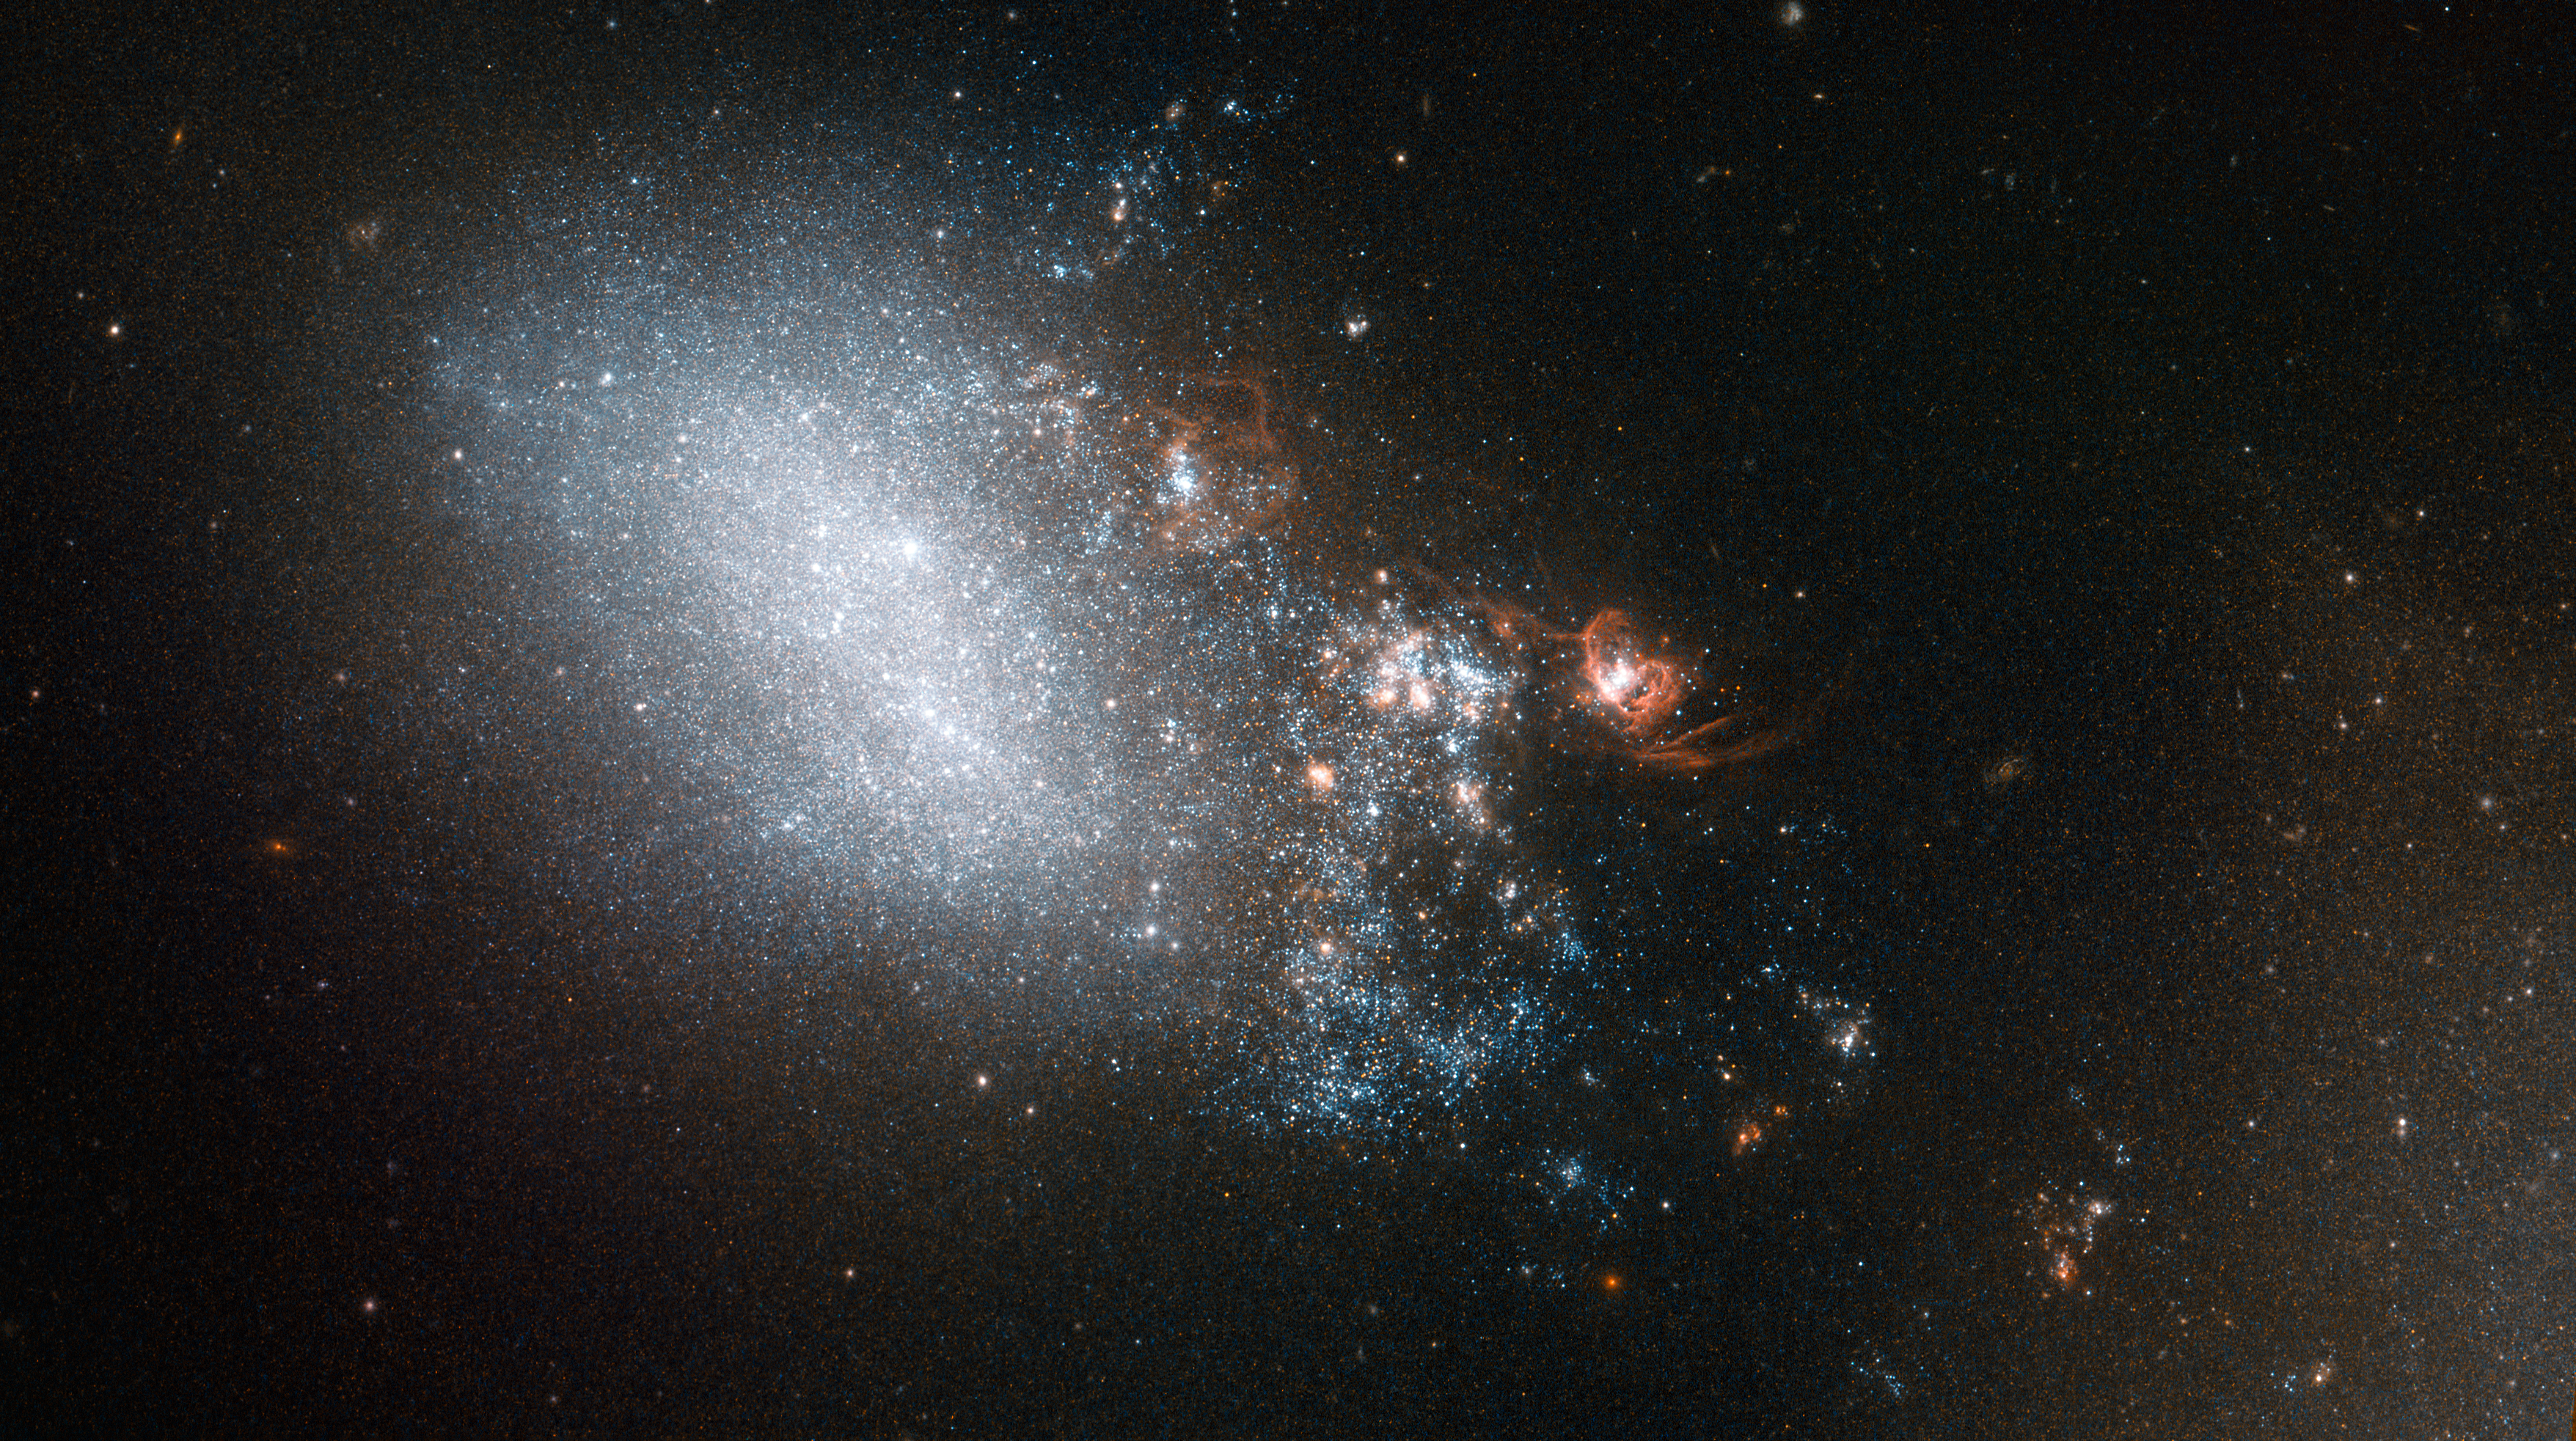

Starbursts in the wake of a fleeting romance

This image shows galaxy NGC 4485 in the constellation of Canes Venatici (The Hunting Dogs). The galaxy is irregular in shape, but it hasn’t always been so. Part of NGC 4485 has been dragged towards a second galaxy, named NGC 4490 — which lies out of frame to the bottom right of this image.

Between them, these two galaxies make up a galaxy pair called Arp 269. Their interactions have warped them both, turning them from spiral galaxies into irregular ones. NGC 4485 is the smaller galaxy in this pair, which provides a fantastic real-world example for astronomers to compare to their computer models of galactic collisions. The most intense interaction between these two galaxies is all but over; they have made their closest approach and are now separating. The trail of bright stars and knotty orange clumps that we see here extending out from NGC 4485 is all that connects them — a trail that spans some 24 000 light-years.

Many of the stars in this connecting trail could never have existed without the galaxies’ fleeting romance. When galaxies interact hydrogen gas is shared between them, triggering intense bursts of star formation. The orange knots of light in this image are examples of such regions, clouded with gas and dust.

A version of this image was entered into the Hubble’s Hidden Treasures image processing competition by contestant Kathy van Pelt, and won sixth prize in the “basic image searching” category.

Credit: ESA/Hubble & NASA
Acknowledgement: Kathy van Pelt